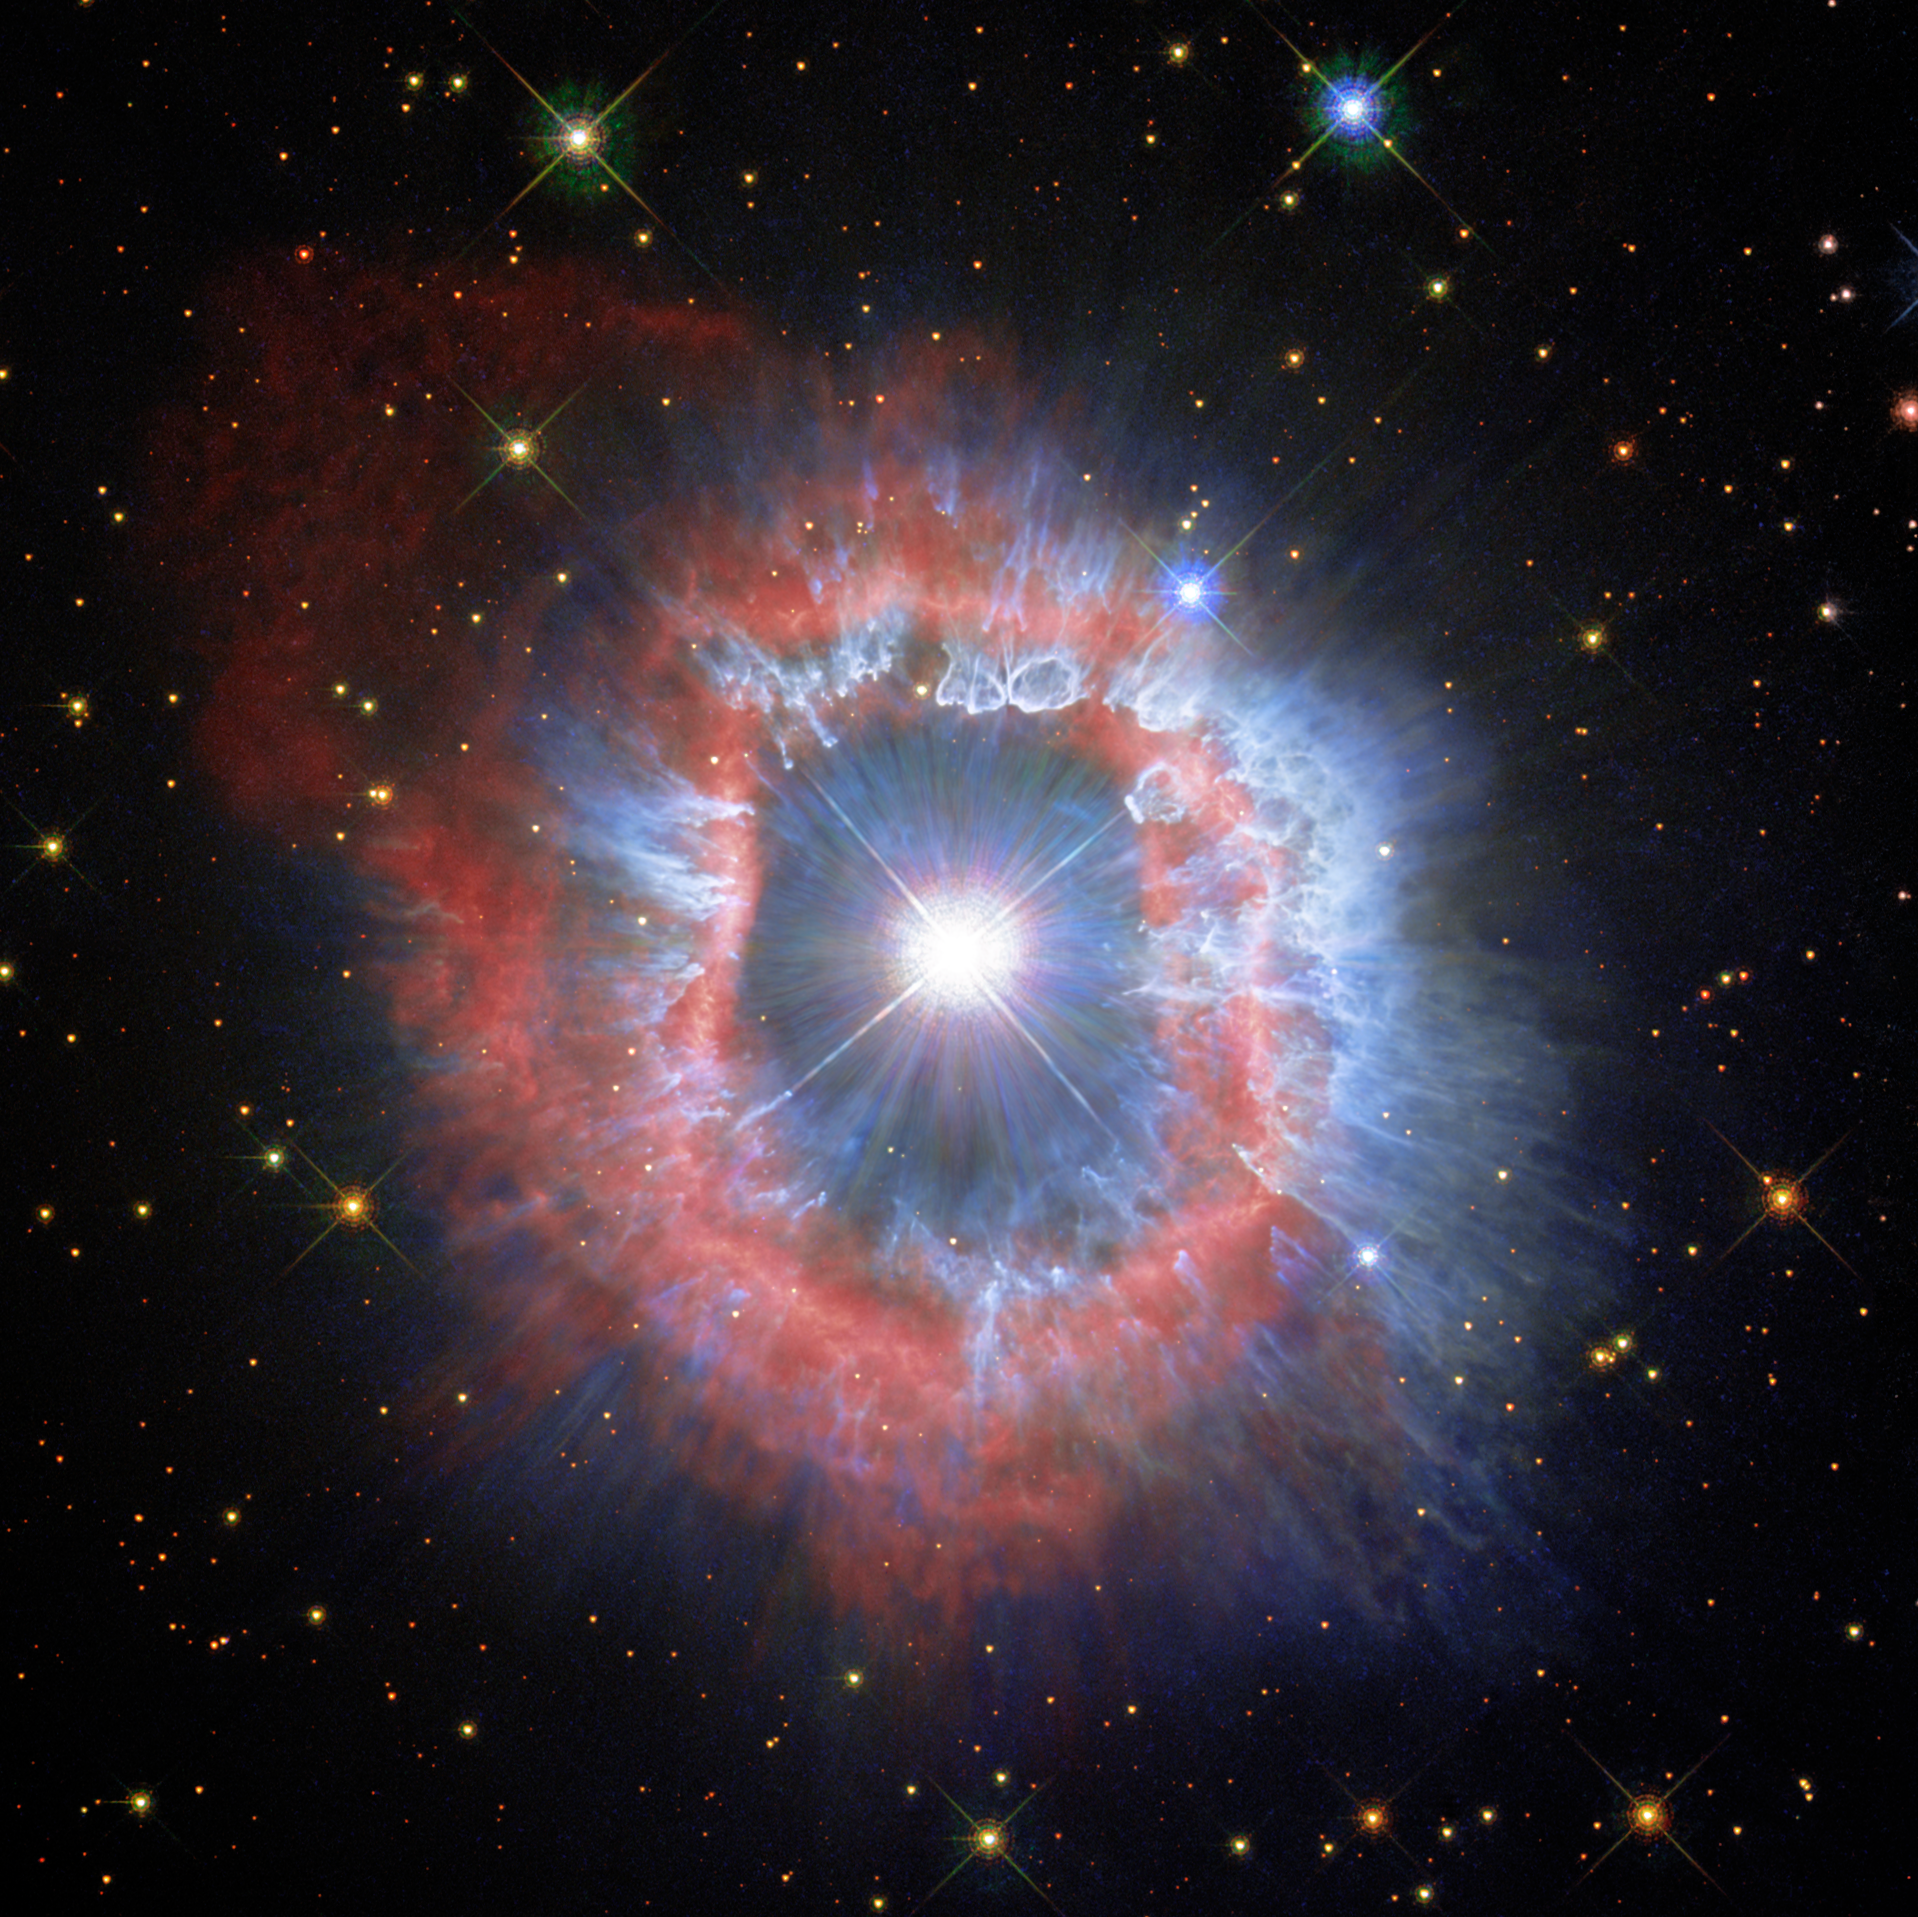

A Closer Look at Hubble’s 31st Anniversary Snapshot

This comparison view shows puffing dust bubbles and an erupting gas shell — the final acts of a monster star.You can explore the detail of the nebula surrounding the star AG Carinae by using the slider tool on the image above.

This Picture of the Week showcases new views of the dual nature of the star AG Carinae, which was the target of the NASA/ESA Hubble Space Telescope’s 31st anniversary image in April 2020. This new perspective was developed thanks to Hubble’s observations of the star in 2020 and 2014, along with others captured by the telescope’s WFPC2 instrument in 1994. You can compare these two new versions of AG Carinae by using the slider tool on the image above.

The first image showcases the details of the ionised hydrogen and ionised nitrogen emissions from the nebula (seen here in red). In the second image, the blue demonstrates the contrasting appearance of the distribution of the dust that shines of reflected stellar light. Astronomers believe that the dust bubbles and filaments formed within and were shaped by powerful stellar wind .

This giant star is waging a tug-of-war between gravity and radiation to avoid self-destruction. The star is surrounded by an expanding shell of gas and dust — a nebula — that is shaped by the powerful winds emanating from the star. The nebula is about five light-years wide, equal to the distance from here to our nearest star, Alpha Centauri.

AG Carinae is formally classified as a Luminous Blue Variable because it is hot (blue), very luminous, and variable. Such stars are quite rare because there are not many stars that are so massive. Luminous Blue Variable stars continuously lose mass in the final stages of their life, during which a significant amount of stellar material is ejected into the surrounding interstellar space, until enough mass has been lost that the star has reached a stable state.

AG Carinae is surrounded by a spectacular nebula, formed by material ejected by the star during several of its past outbursts. The nebula is approximately 10 000 years old, and the observed velocity of the gas is approximately 70 kilometres per second. While this nebula looks like a ring, it is in fact a hollow shell rich in gas and dust, the centre of which has been cleared by the powerful stellar wind travelling at roughly 200 kilometres per second. The gas (composed mostly of ionised hydrogen and nitrogen) is visible to us in these images as a thick bright red ring, which appears doubled in places — possibly the result of several outbursts colliding into each other. The dust, here visible in blue, has formed in clumps, bubbles and filaments that are shaped by the stellar wind.

Scientists who observed the star and its surrounding nebula note that the ring is not perfectly spherical; it appears to have a bipolar symmetry, indicating that the mechanism producing the outburst may have been caused by the presence of a disc in the centre, or that the star is not alone but might have a companion (known as a binary star). An alternative and simpler theory is that the star rotates very fast (as many massive stars have been found to do).

Credit: ESA/Hubble and NASA, A. Nota, C. Britt